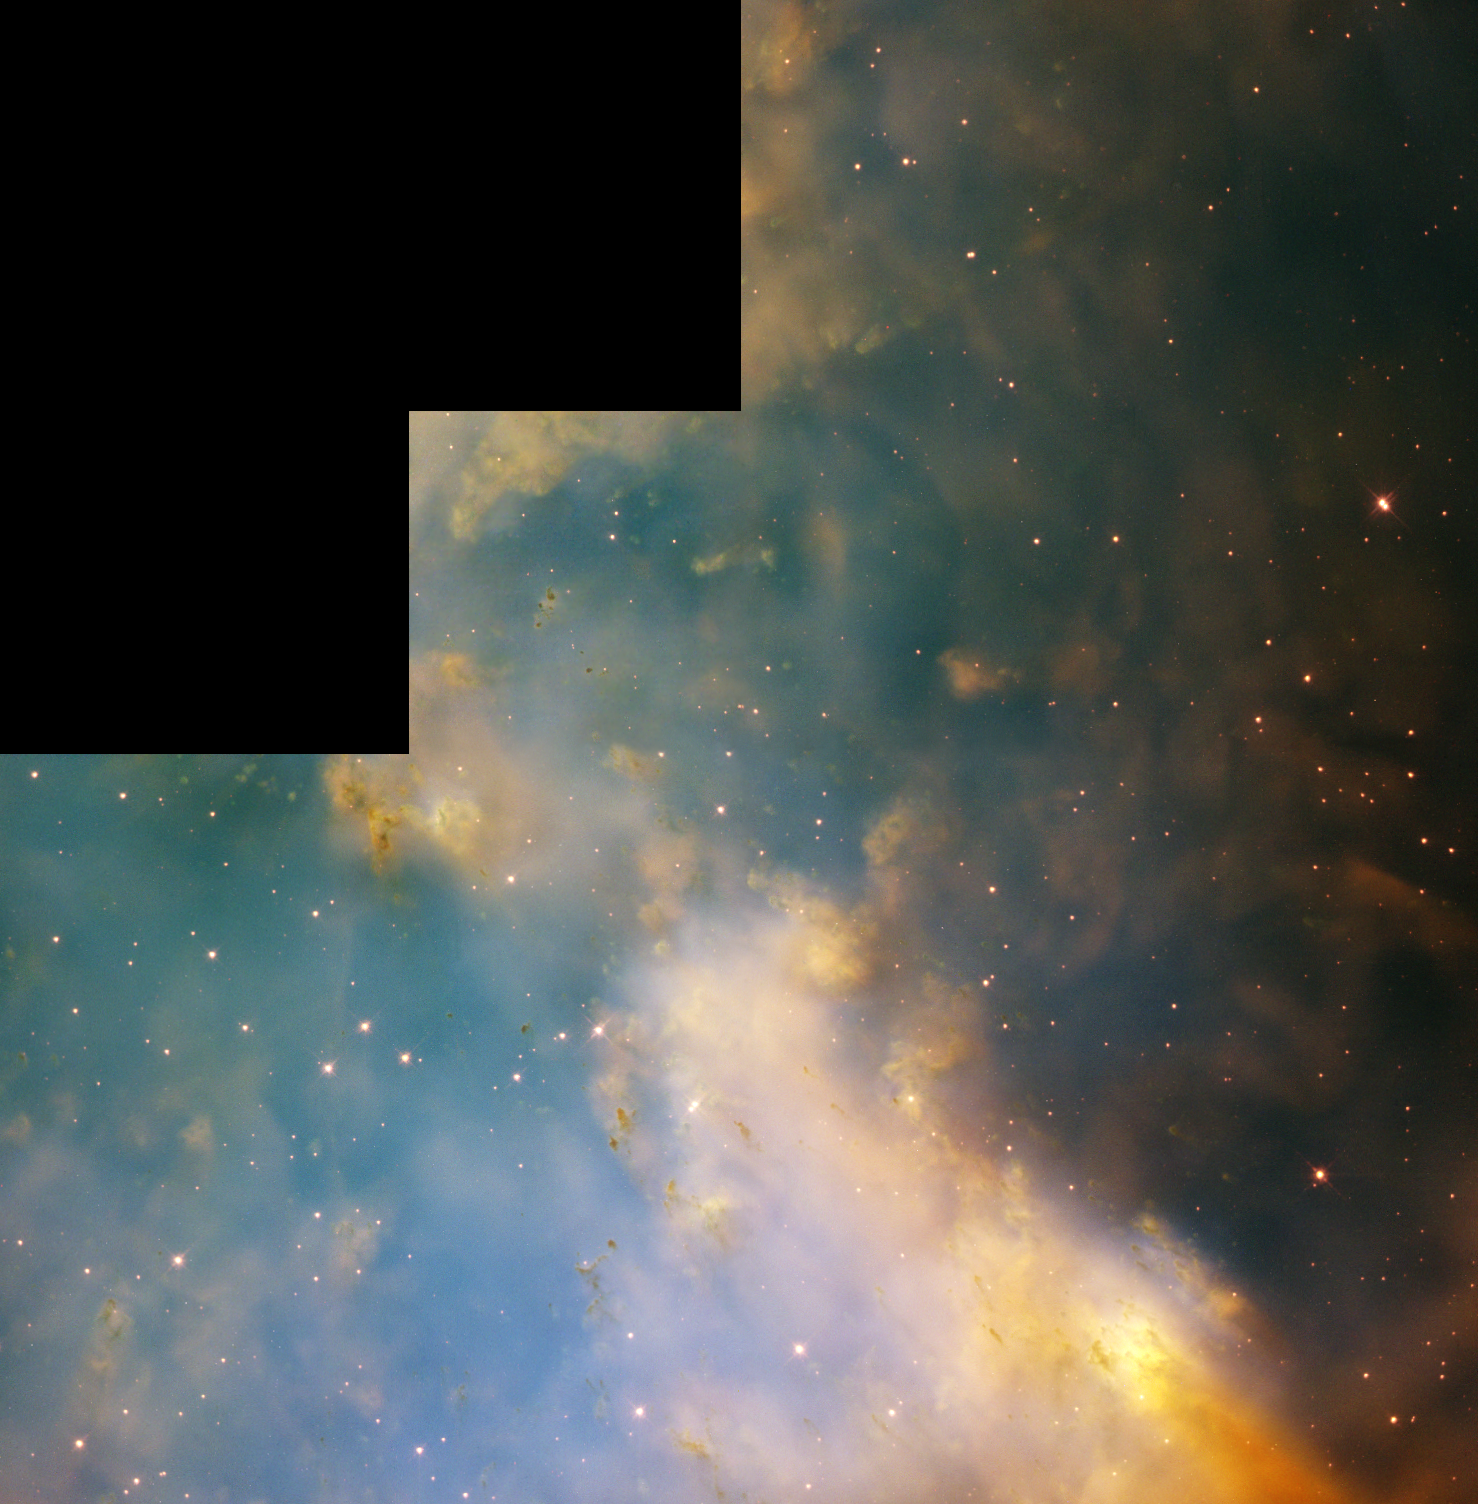

Hubble's Full WFPC2 Image of Dumbbell Nebula

An aging star's last hurrah is creating a flurry of glowing knots of gas that appear to be streaking through space in this close-up image of the Dumbbell Nebula, taken with NASA's Hubble Space Telescope. The Dumbbell, a nearby planetary nebula residing more than 1,200 light-years away, is the result of an old star that has shed its outer layers in a glowing display of color. The nebula, also known as Messier 27 (M27), was the first planetary nebula ever discovered. French astronomer Charles Messier spotted it in 1764.

Credit: NASA/ESA and The Hubble Heritage Team (STScI/AURA)